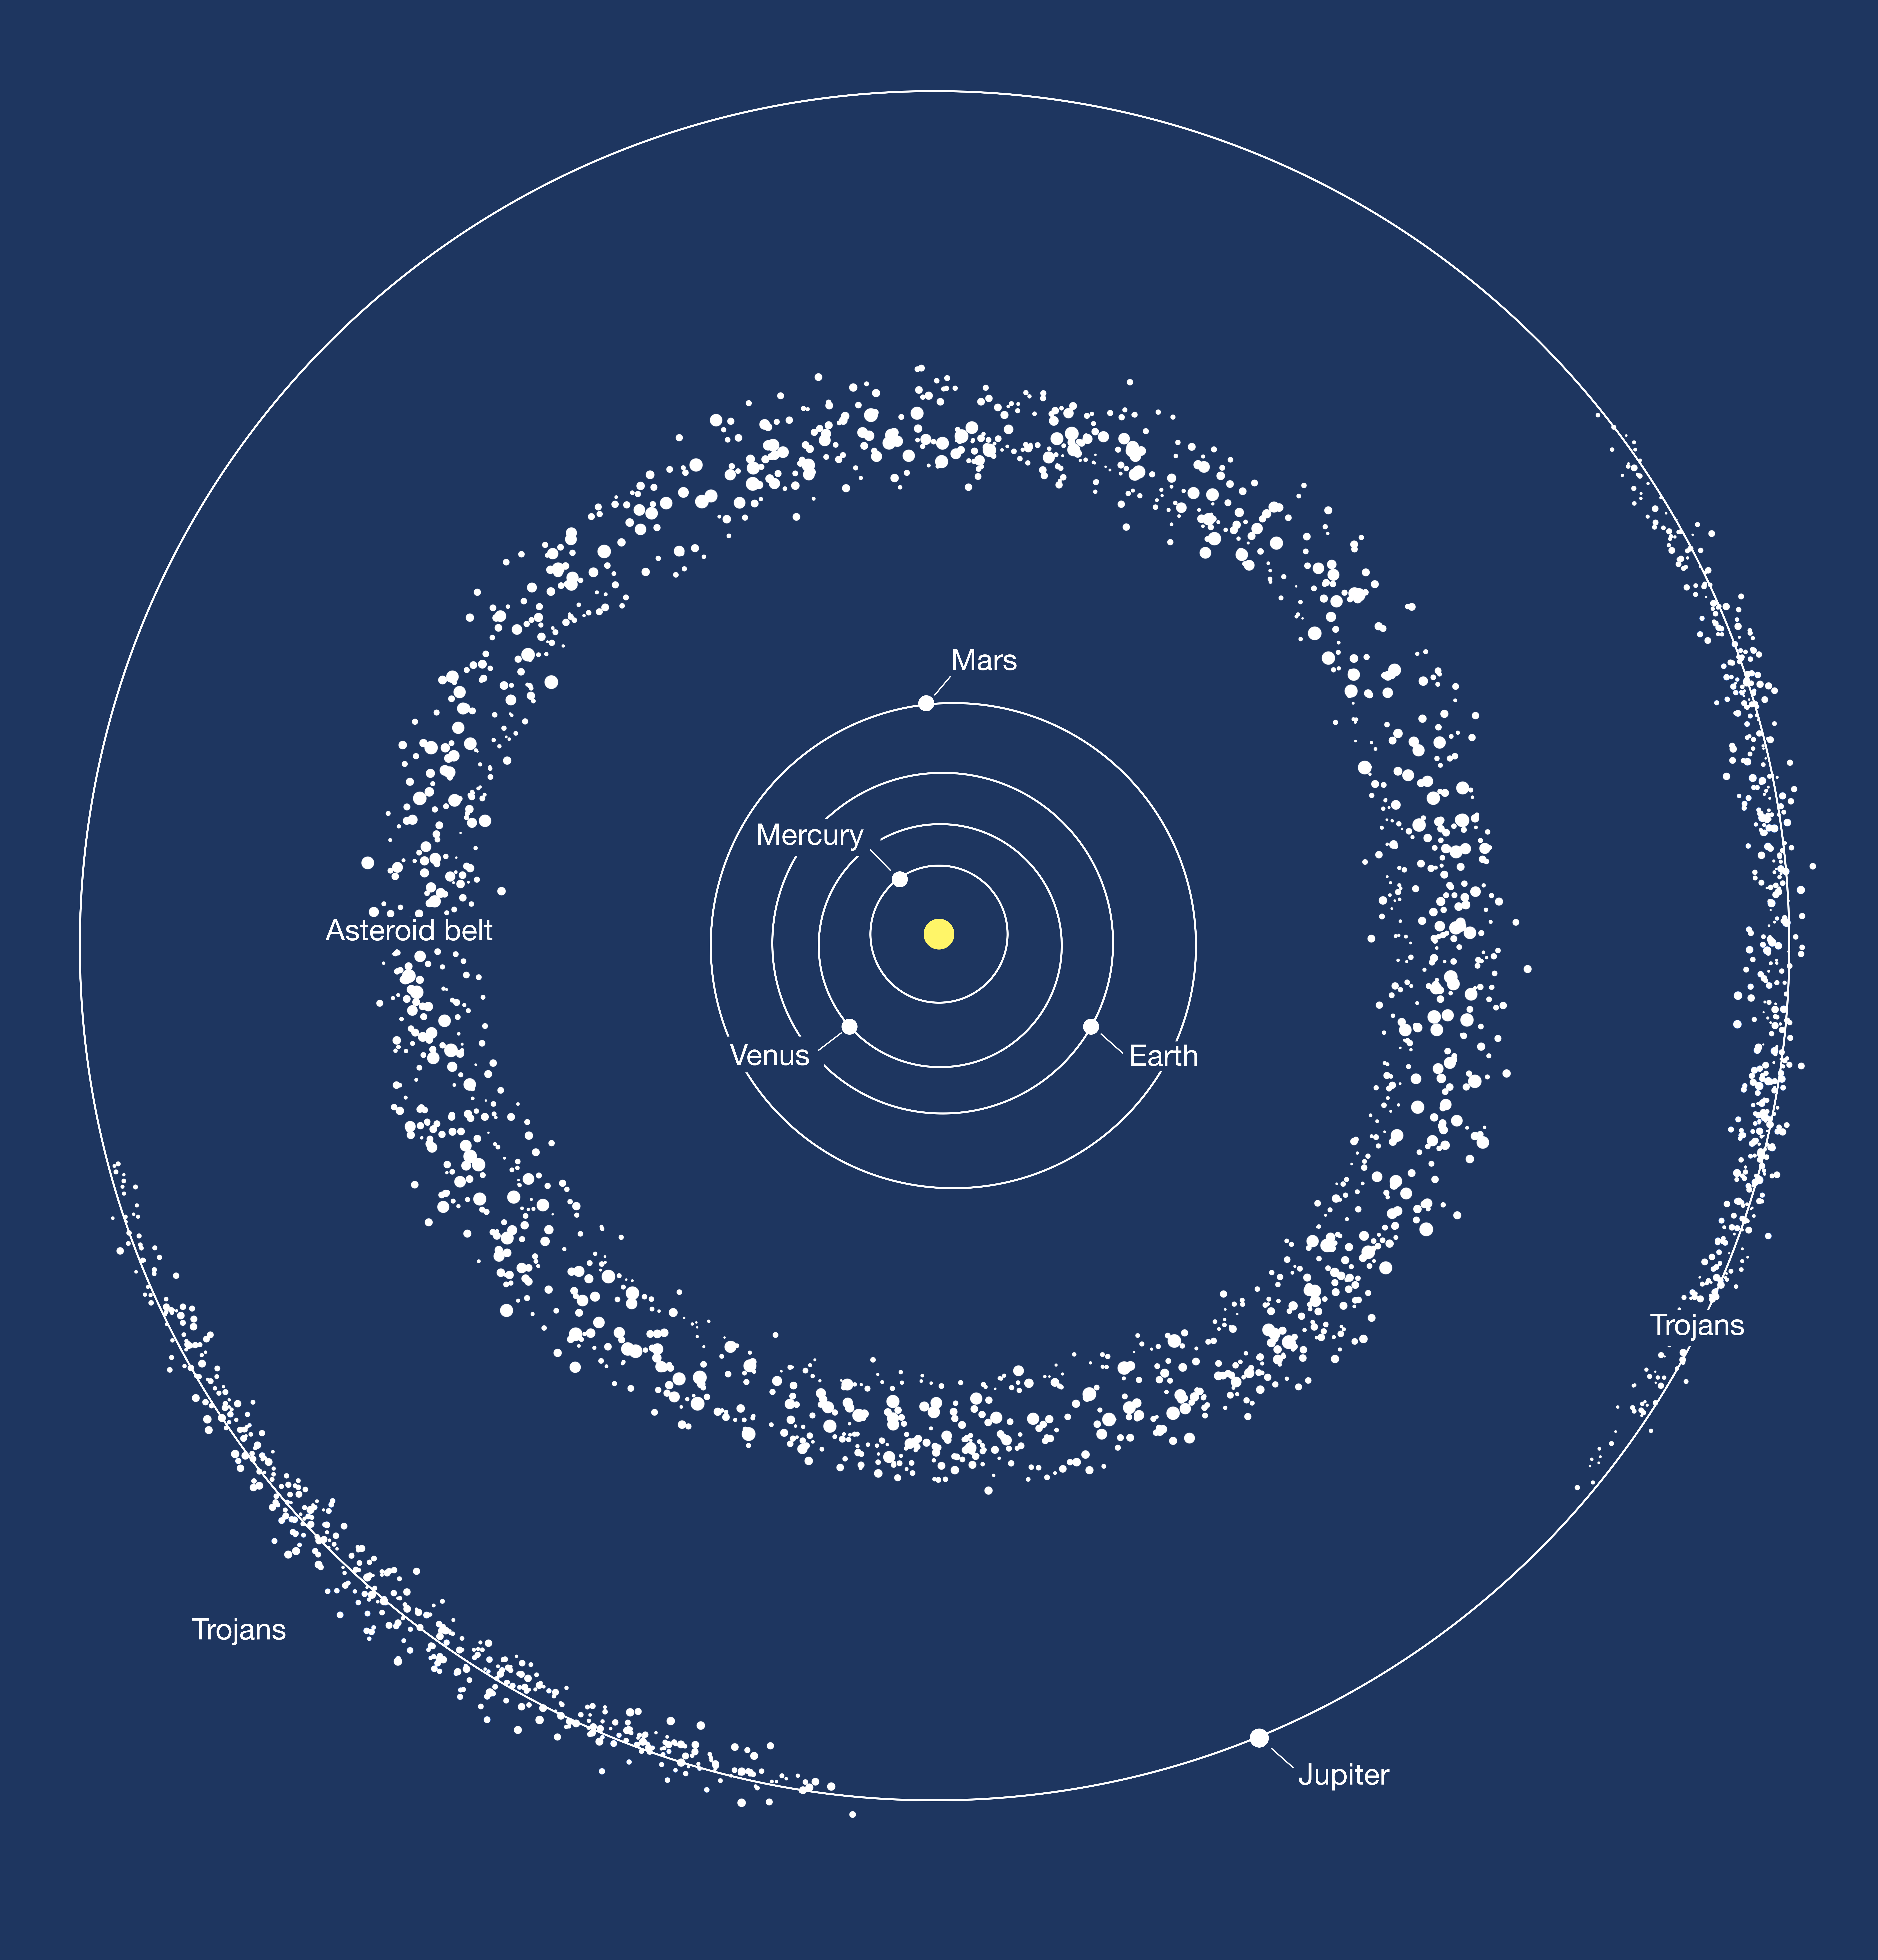

Asteroid belt

This image depicts the two areas where most of the asteroids in the Solar System are found: the asteroid belt between Mars and Jupiter, and the trojans, two groups of asteroids moving ahead of and following Jupiter in its orbit around the Sun.

The binary asteroid 288P is part of the asteroid belt.

Credit: ESA/Hubble, M. Kornmesser